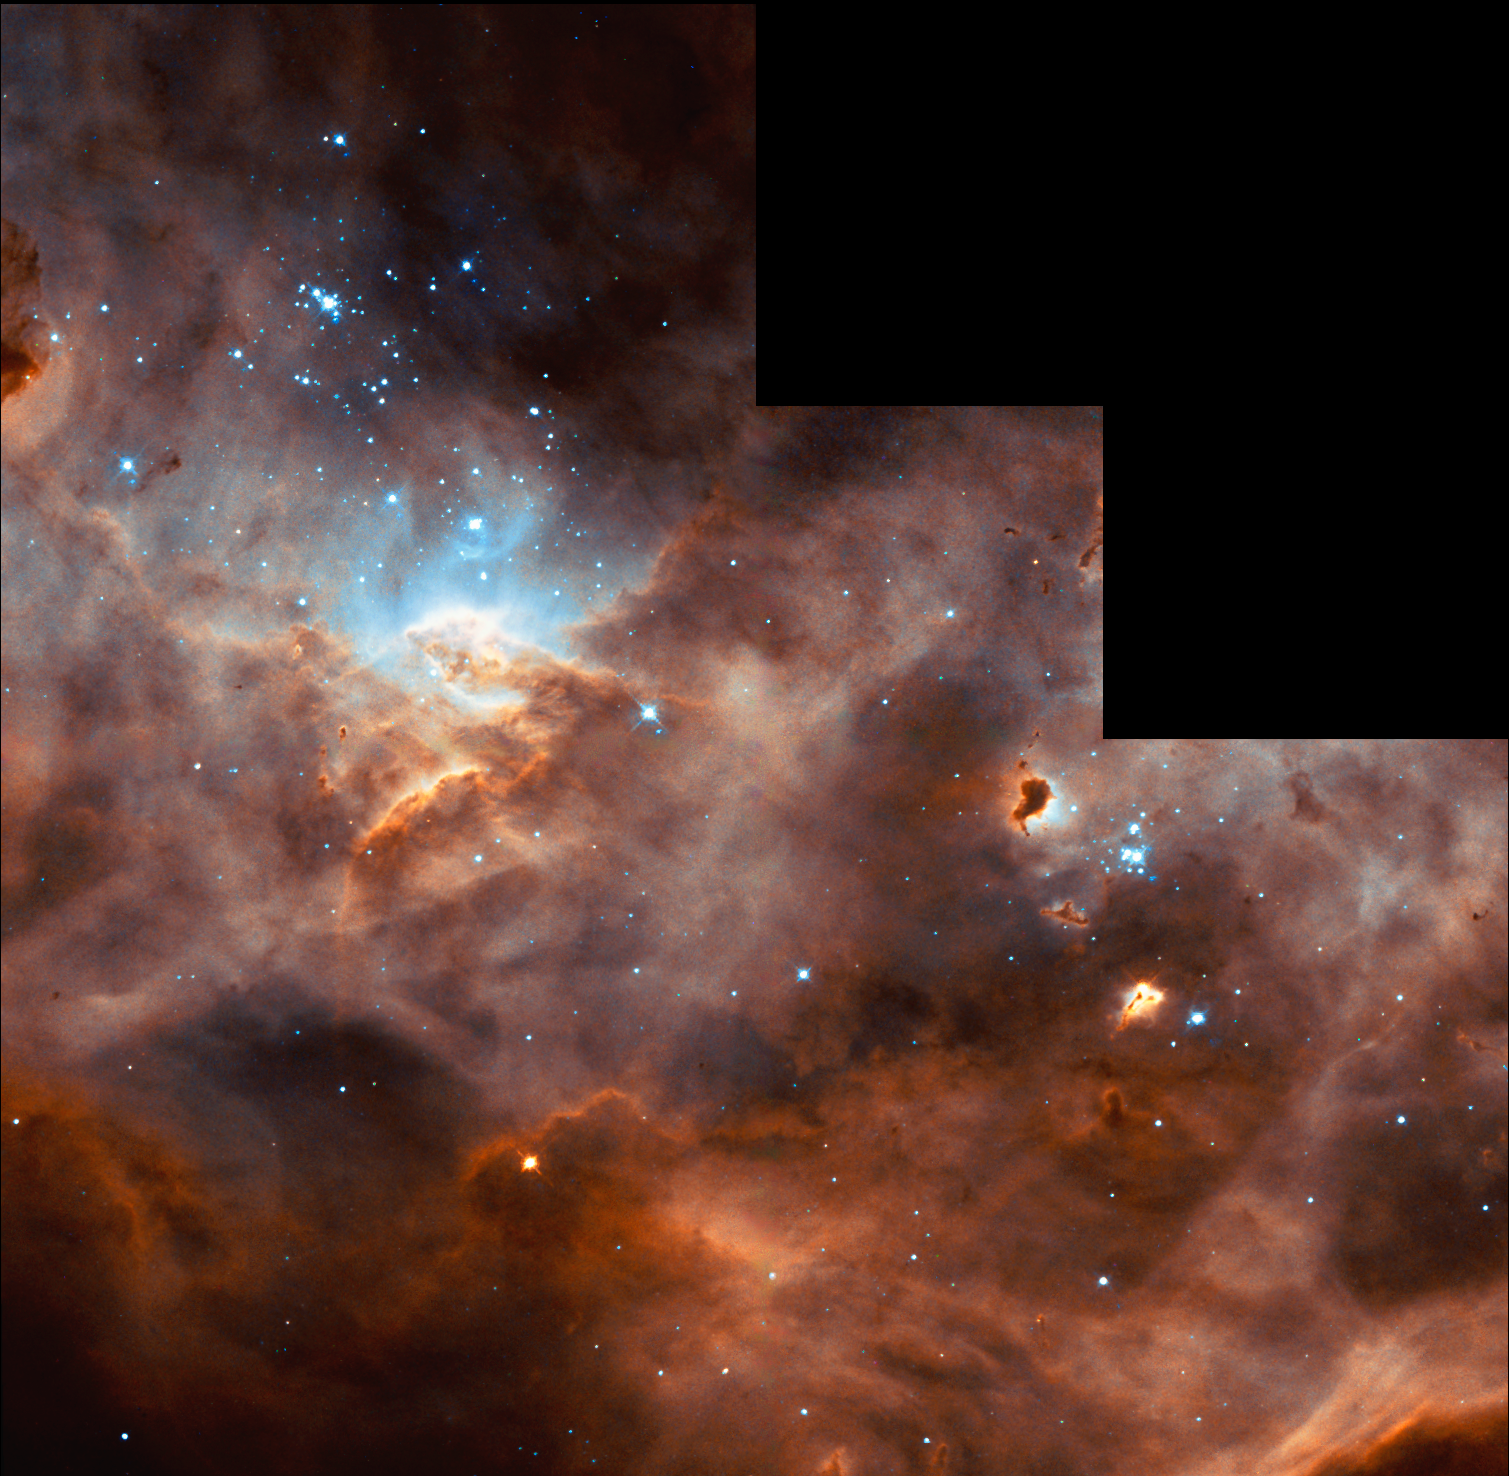

Hubble studies sequences of star formation in neighbouring galaxy [full WFPC2 frame]

The NASA/ESA Hubble Space Telescope captures the iridescent tapestry of star birth in a neighbouring galaxy in this panoramic view of glowing gas, dark dust clouds, and young, hot stars. The star-forming region, catalogued as N11B lies in the Large Magellanic Cloud (LMC), located only 160,000 light-years from Earth. With its high resolution, the Hubble Space Telescope is able to view details of star formation in the LMC as easily as ground-based telescopes are able to observe stellar formation within our own Milky Way galaxy.

Our neighbourhood galaxy the Large Magellanic Cloud (LMC) lies in the Constellation of Dorado and is sprinkled with a number of regions harbouring recent and ongoing star formation. One of these star-forming region, N11B, is shown in this Hubble image. It is a subregion within a larger area of star formation called N11. N11 is the second largest star-forming region in LMC. It is only surpassed in the size and activity by "the king of stellar nurseries", 30 Doradus, located at the opposite side of LMC.

This image shows the full Wide Field Planetary Camera 2 frame.

Credit: NASA/ESA and the Hubble Heritage Team (AURA/STScI)/HEIC